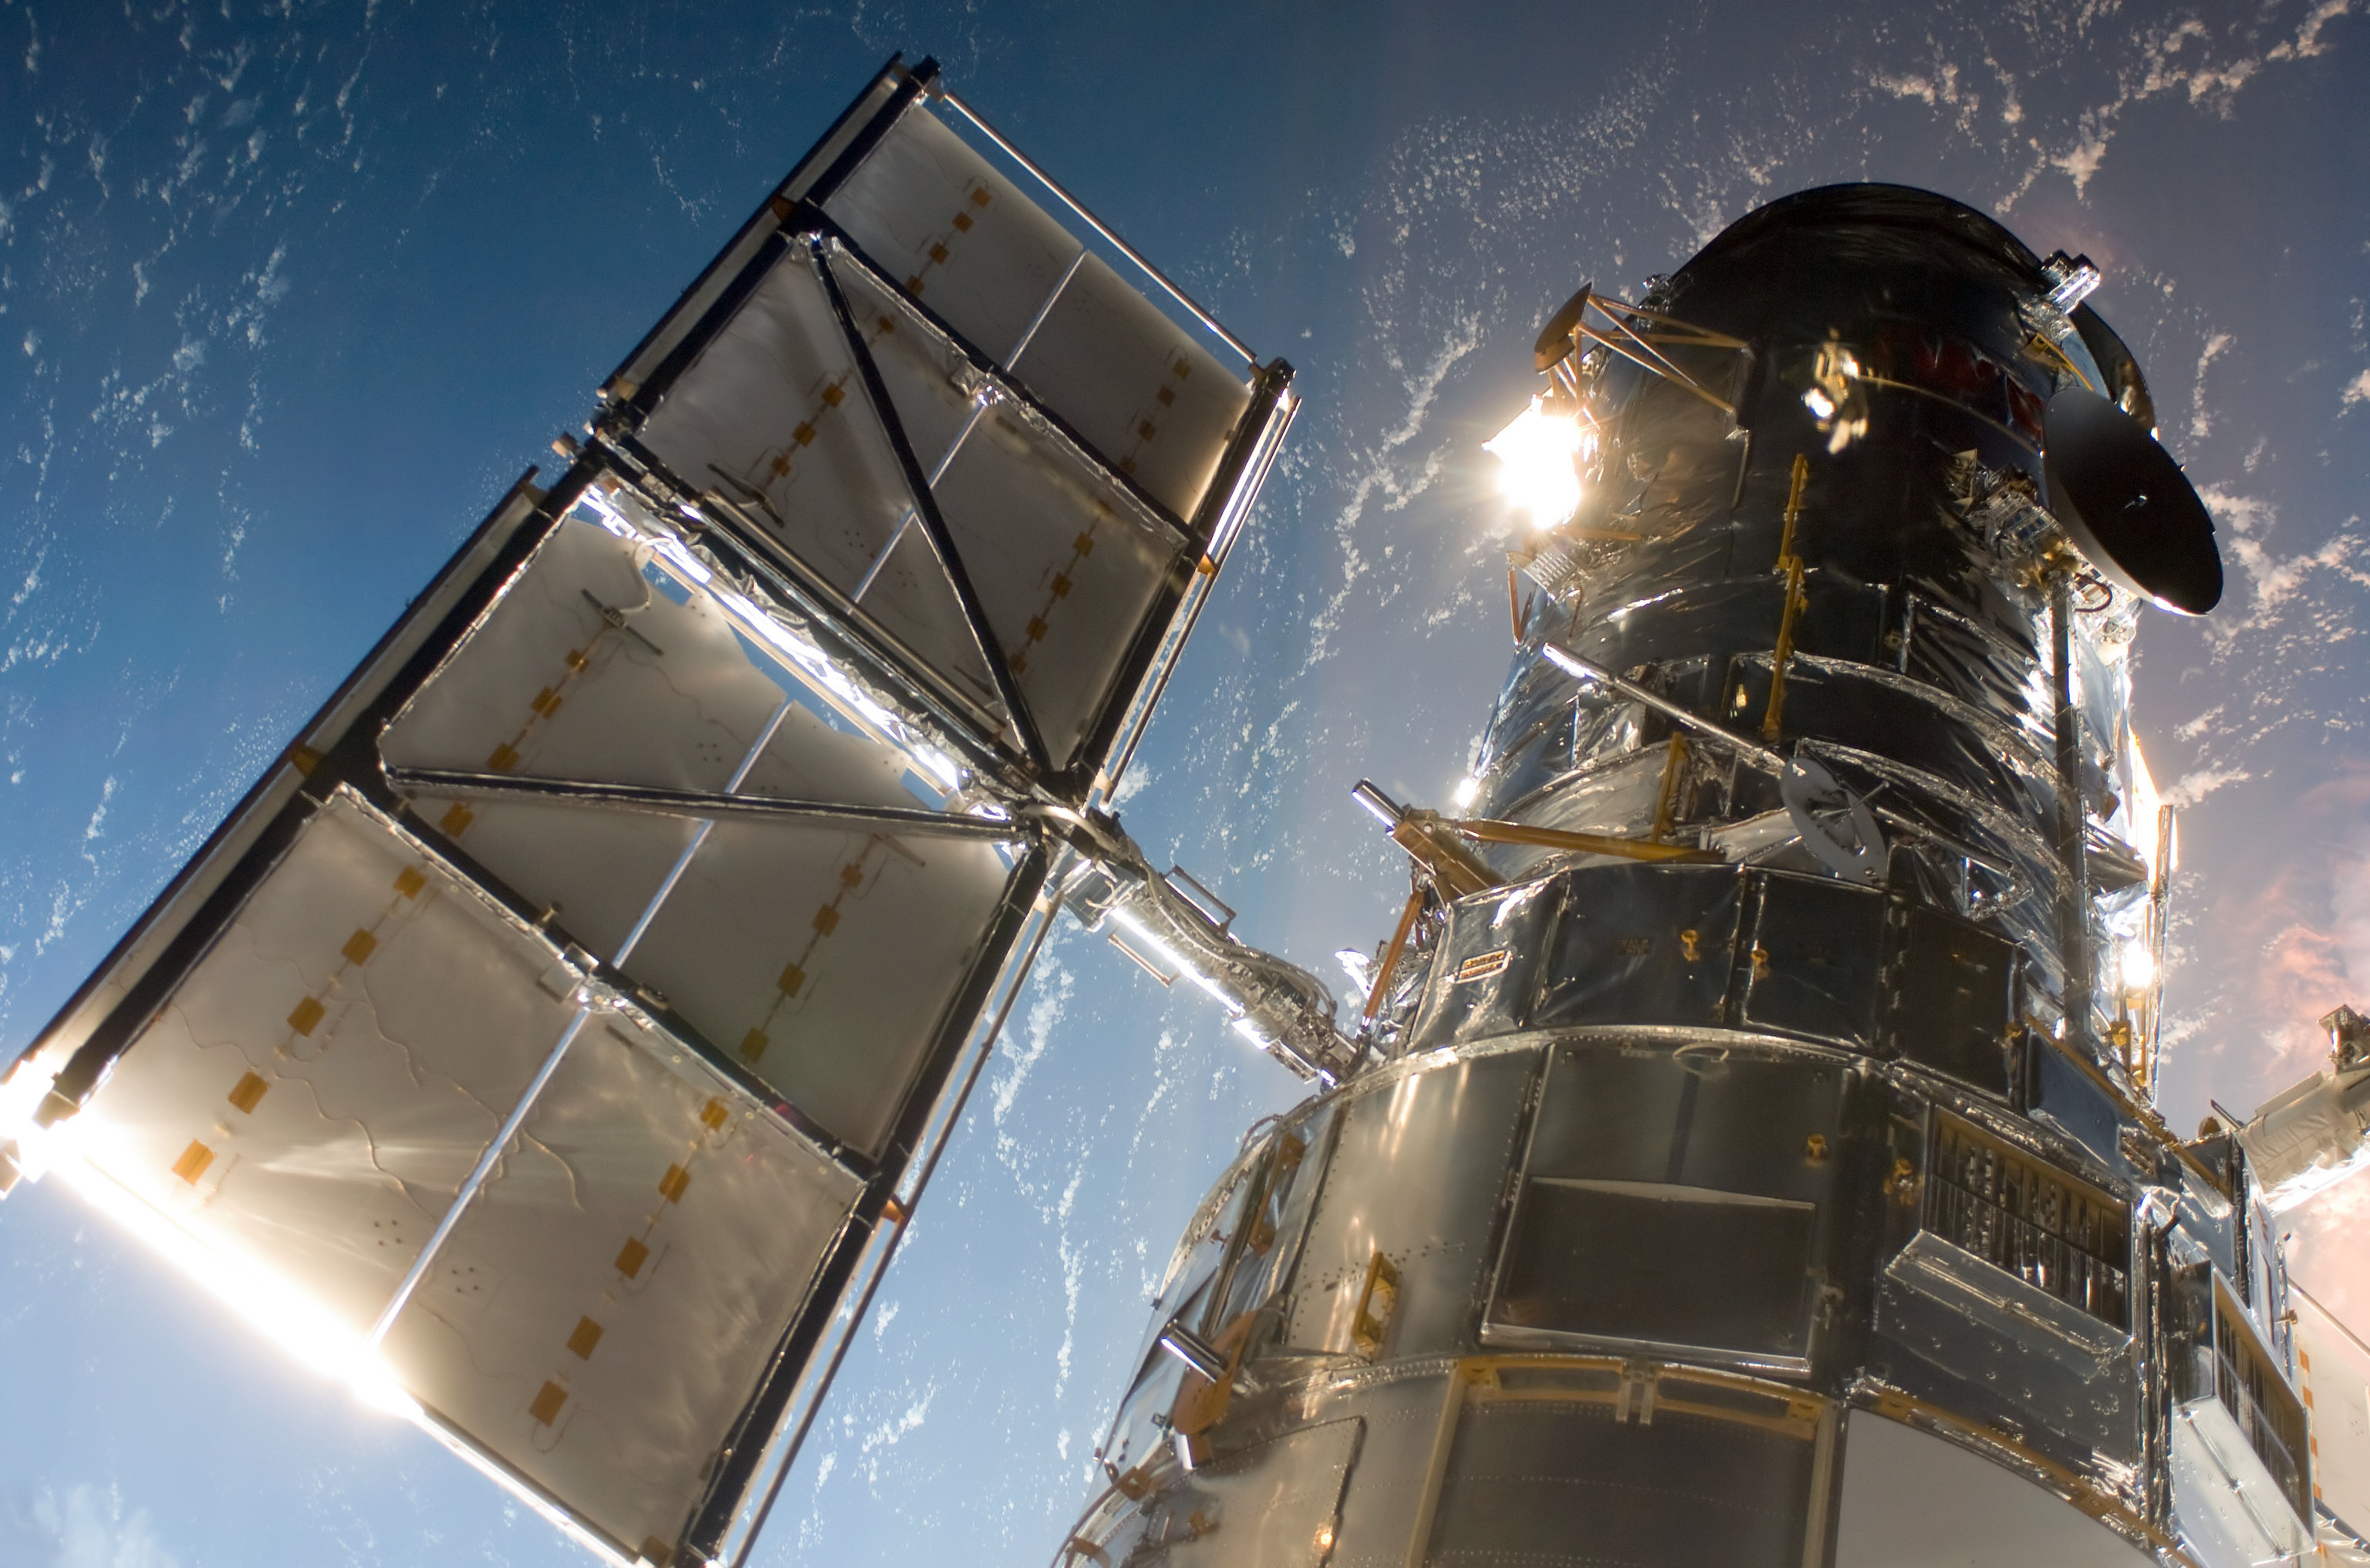

The NASA/ESA Hubble Space Telescope during Servicing Mission 4

This image was taken from the Space Shuttle Atlantis just after the Hubble Space Telescope was intercepted by the Shuttle’s robotic arm during Servicing Mission 4.

Credit: NASA